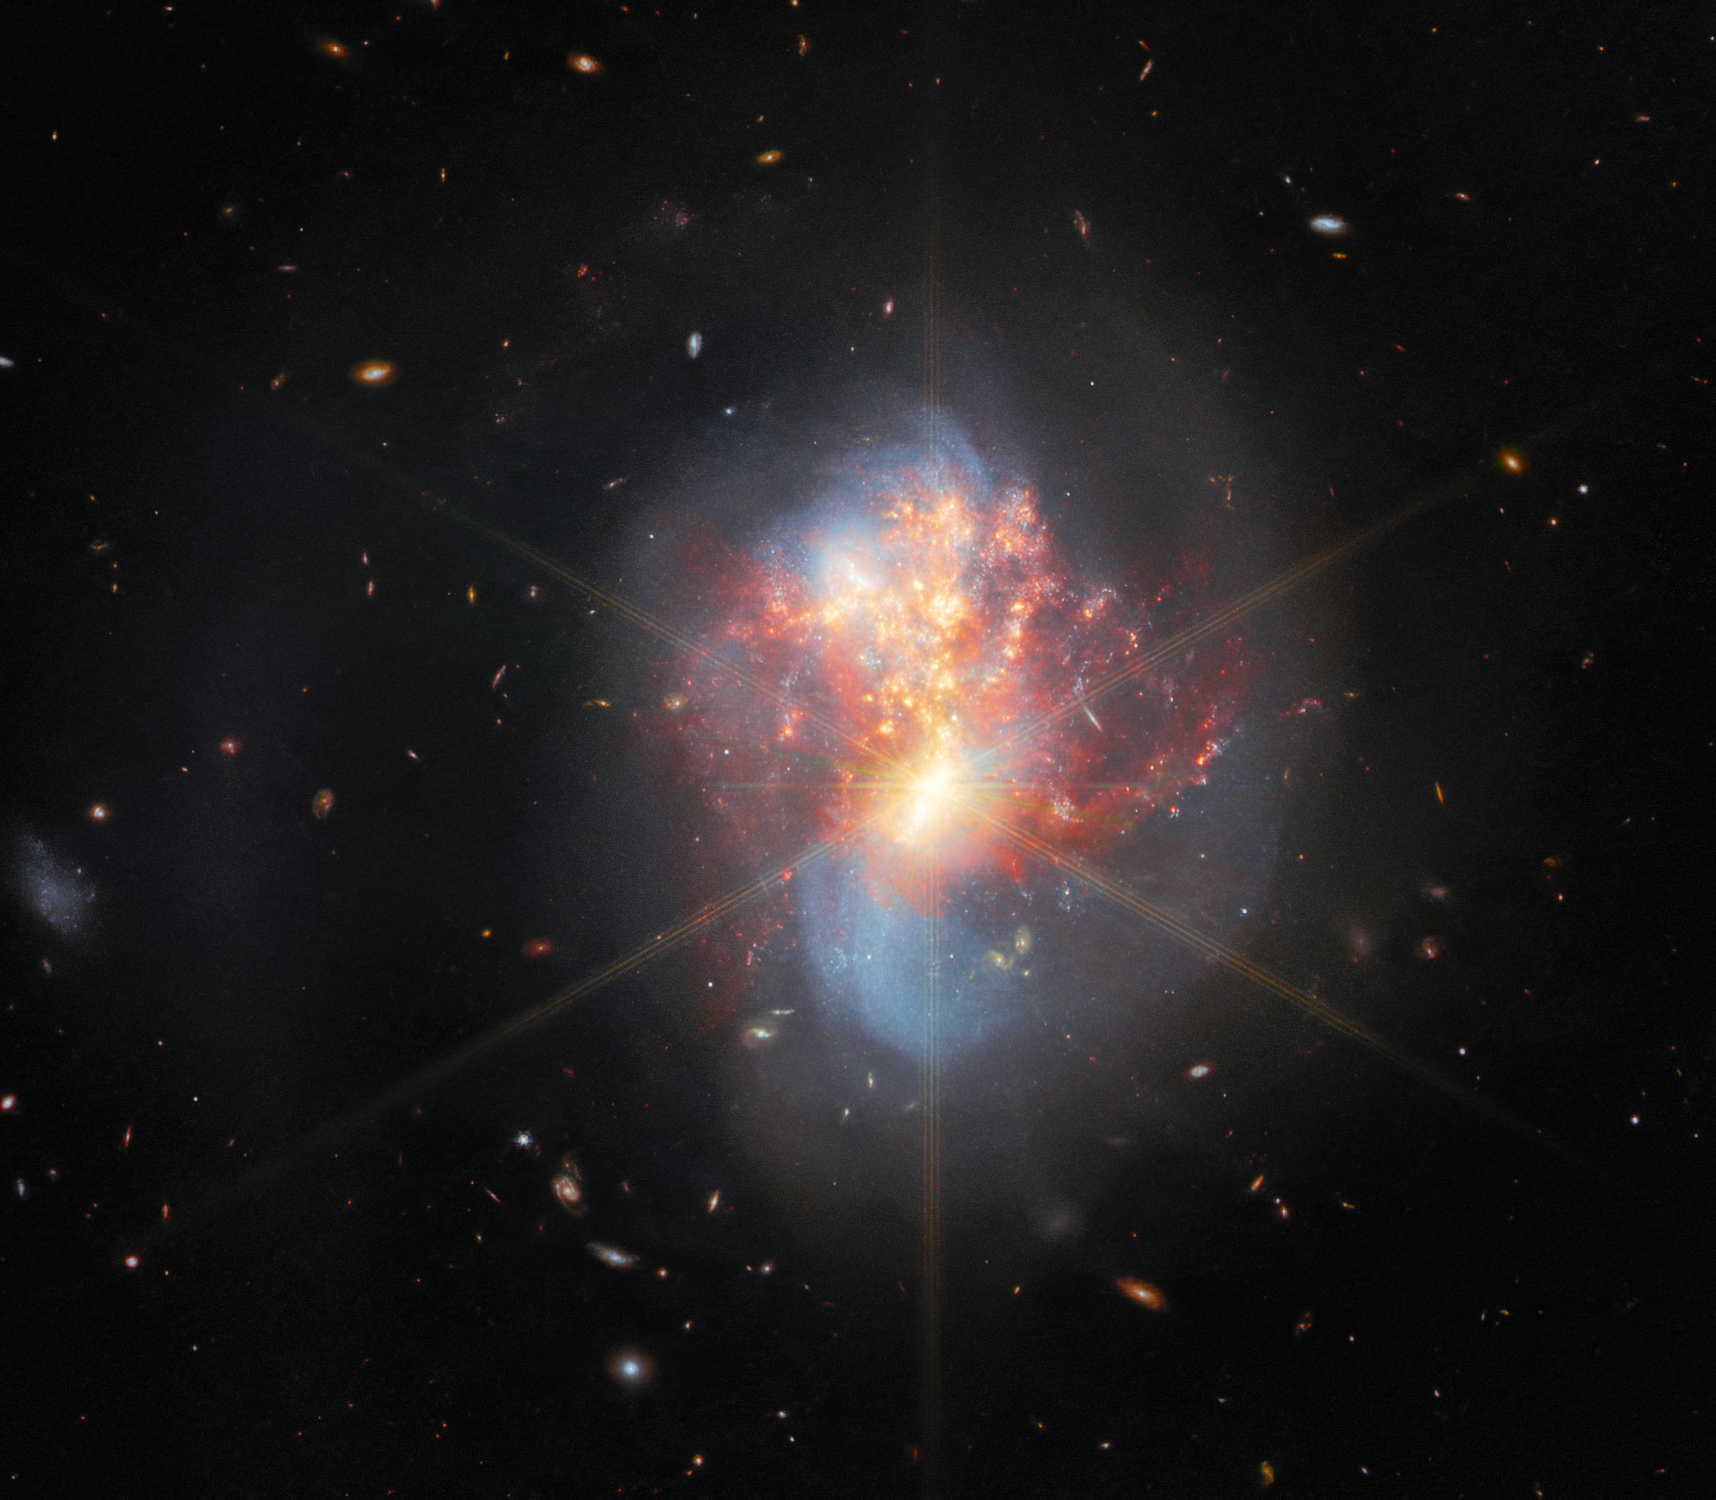

Webb Explores a Pair of Merging Galaxies (scaled)

This image from the NASA/ESA/CSA James Webb Space Telescope depicts IC 1623, an entwined pair of interacting galaxies which lies around 270 million light-years from Earth in the constellation Cetus. The two galaxies in IC 1623 are plunging headlong into one another in a process known as a galaxy merger. Their collision has ignited a frenzied spate of star formation known as a starburst, creating new stars at a rate more than twenty times that of the Milky Way galaxy.

In Webb’s combined MIRI and NIRCam view of the galaxies, the gas being used as fuel by the stellar nurseries is especially apparent. Webb’s ability to pierce the gaseous veil obscuring the bright galactic cores also causes prominent diffraction spikes to appear.

Credit: ESA/Webb, NASA & CSA, L. Armus & A. Evans
Acknowledgement: R. Colombari